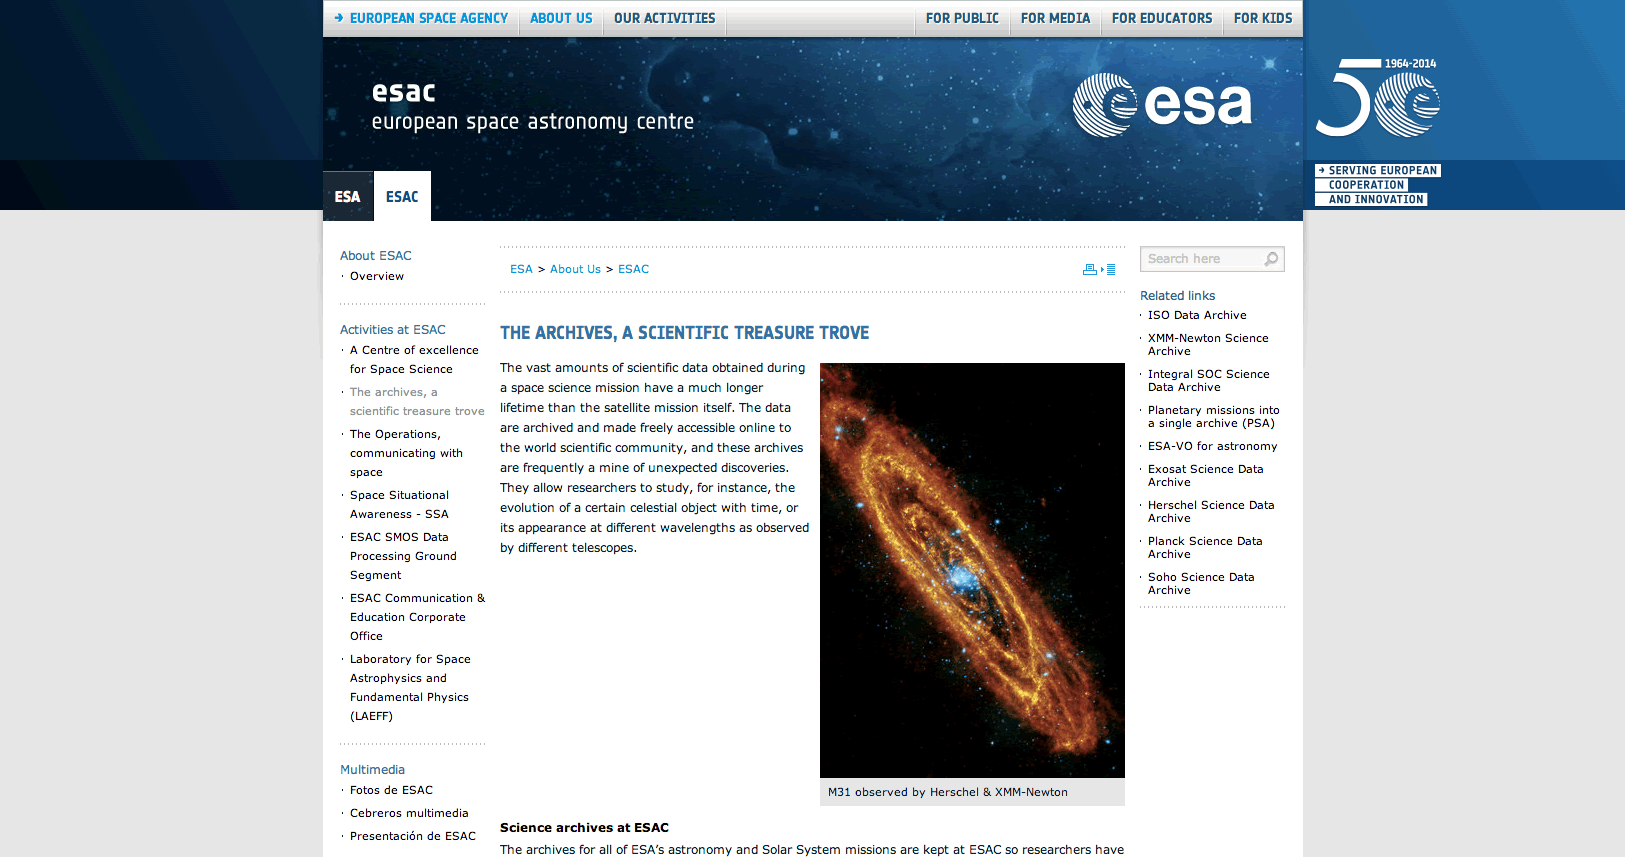

sciann14003a

Screenshot of the website for ESA’s Space Astronomy Centre (ESAC).

Credit: NASA & ESA